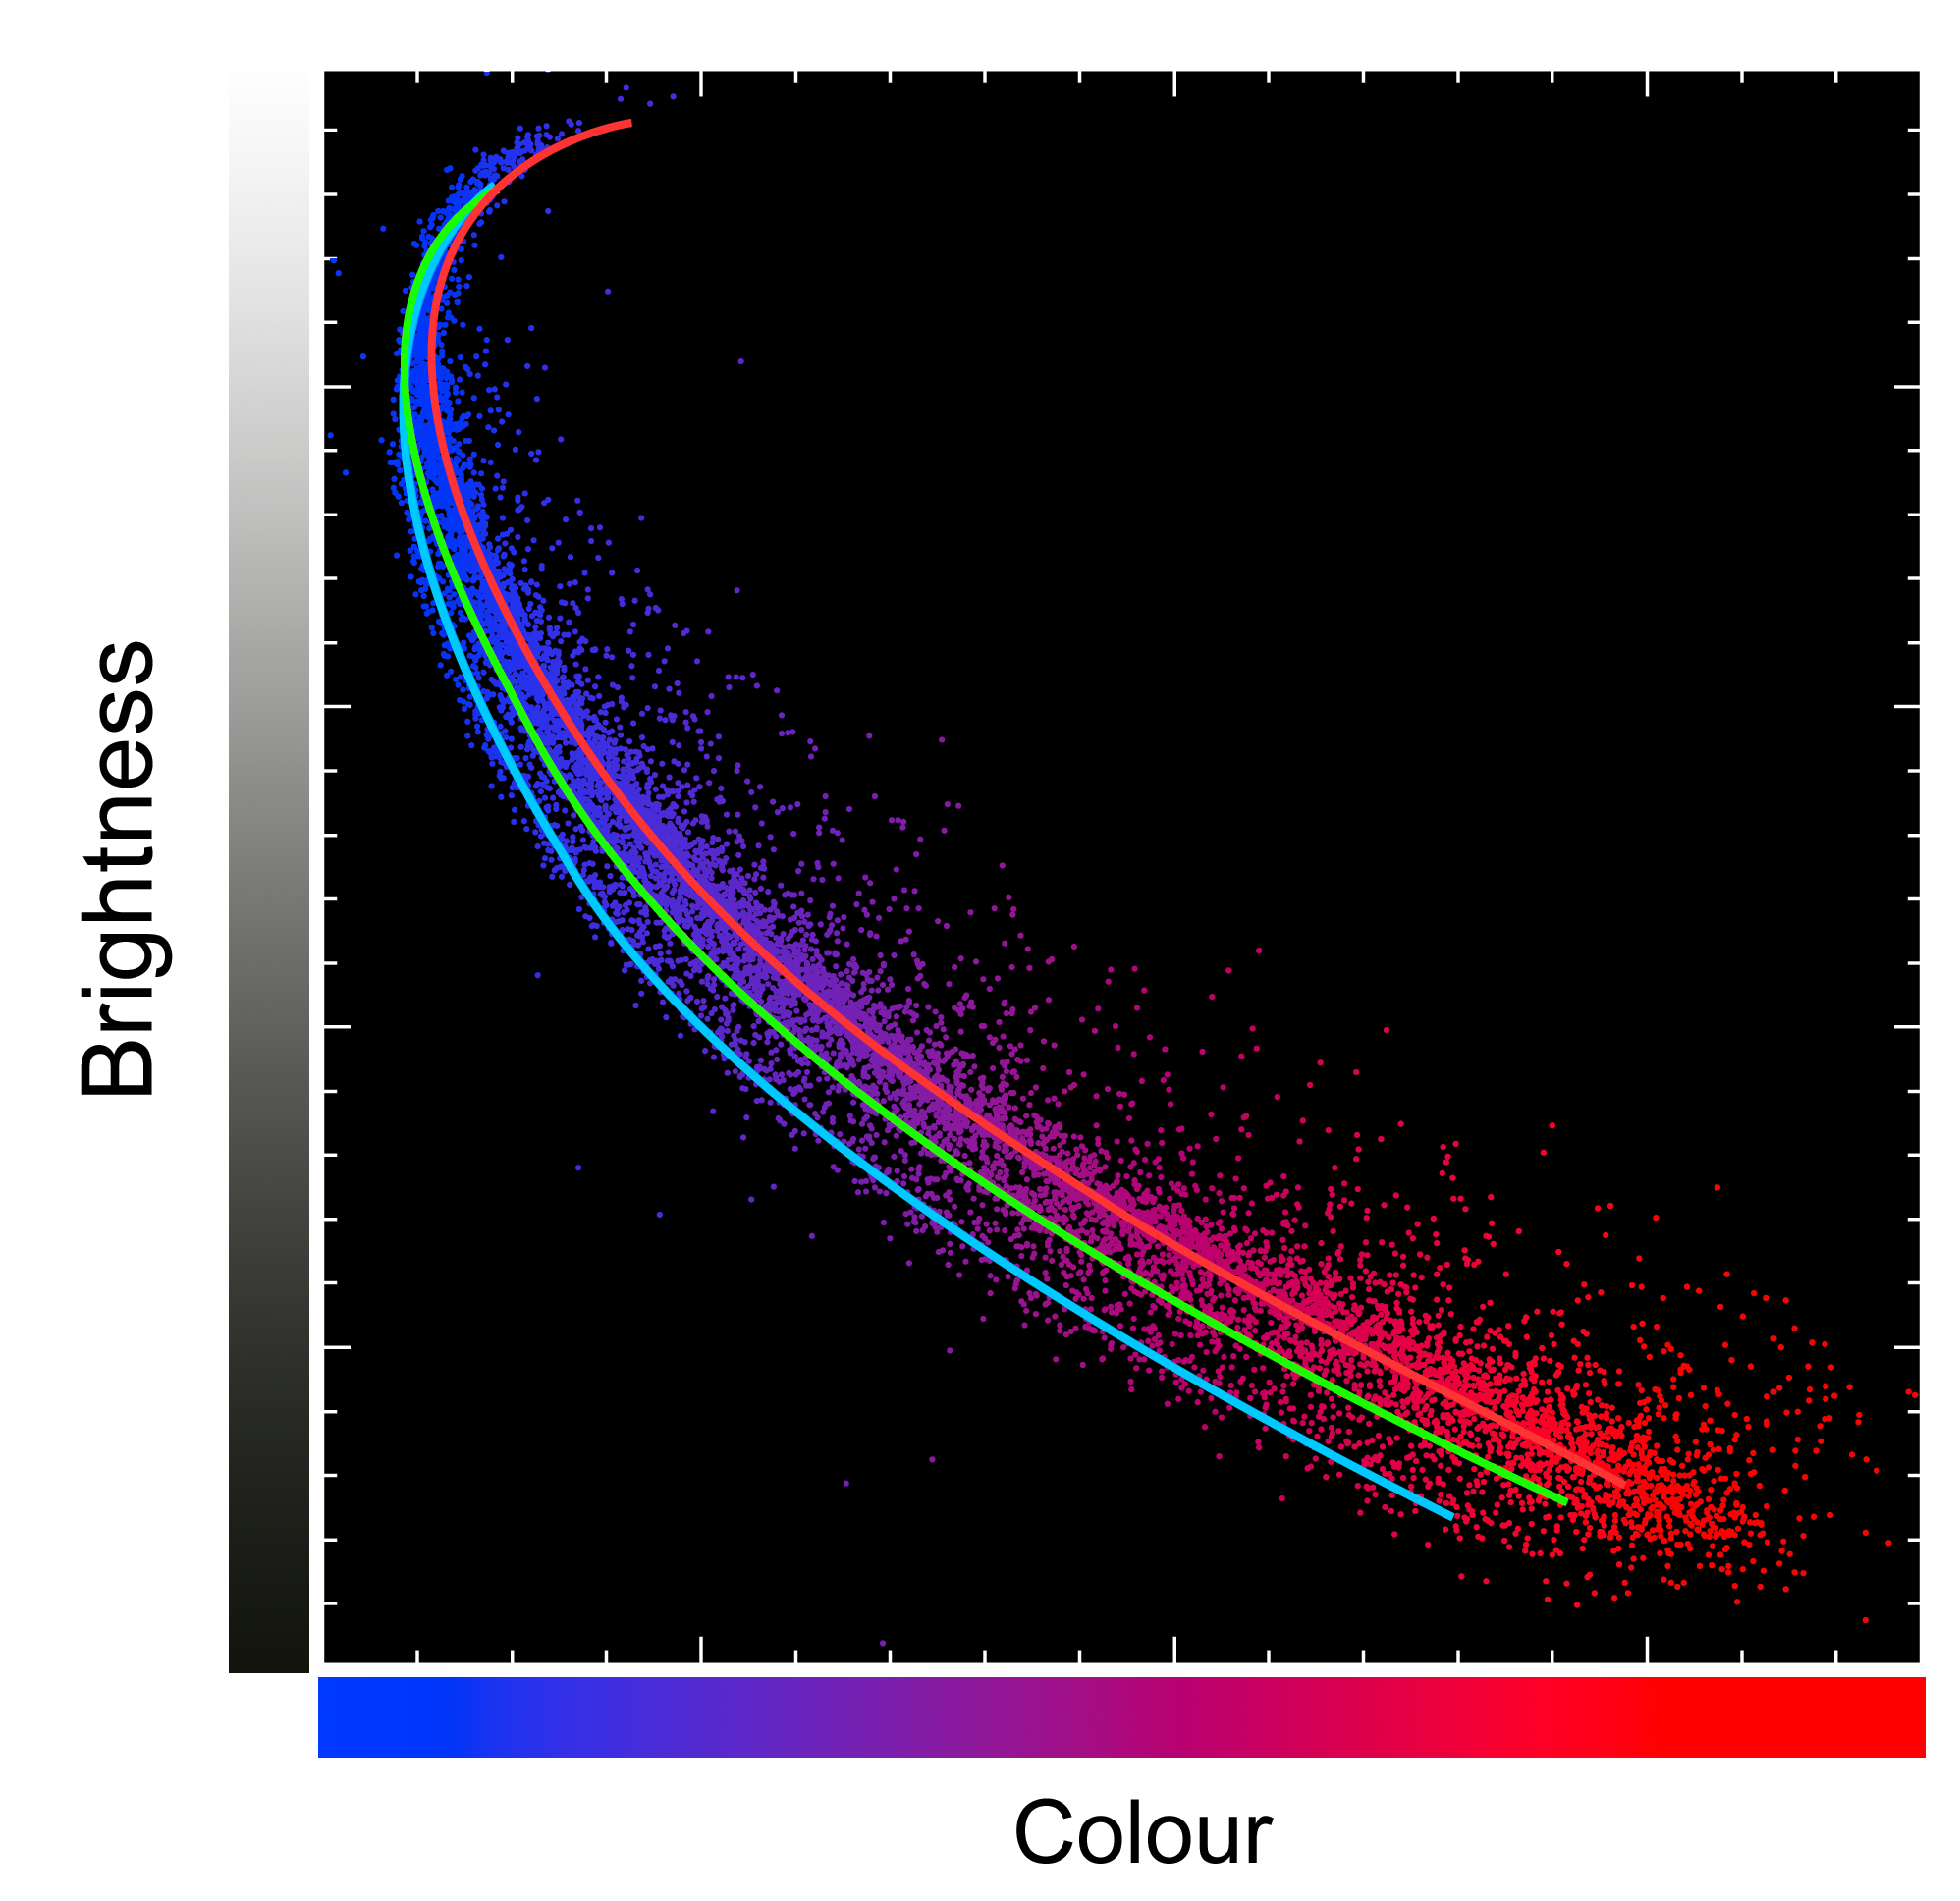

The three generations of stars in NGC 2808

Astronomers were surprised when Hubble spied three generations of cluster stars in globular cluster NGC 2808. The discovery is far different from the standard picture of a globular cluster. For decades, astronomers thought that cluster stars formed at the same time, in the same place, and from the same material, and have co-evolved for billions of years.

Each point in this graph represents one star in NGC 2808. The vertical axis represents the brightness (as measured through Hubble's near-infrared F814W filter) of the stars (the brightest stars near the top). The horizontal axis represents the colours of the stars, with bluer stars to the left and redder to the right (blue magnitude minus near-infrared magnitude). The three coloured curved lines, red, green and blue, represent the three different stellar generations that are present in the globular cluster.

Credit: European Space Agency, NASA, G. Piotto (University of Padua, Italy), A. Sarajedini (University of Florida, USA) and Martin Kornmesser (ESA/Hubble)